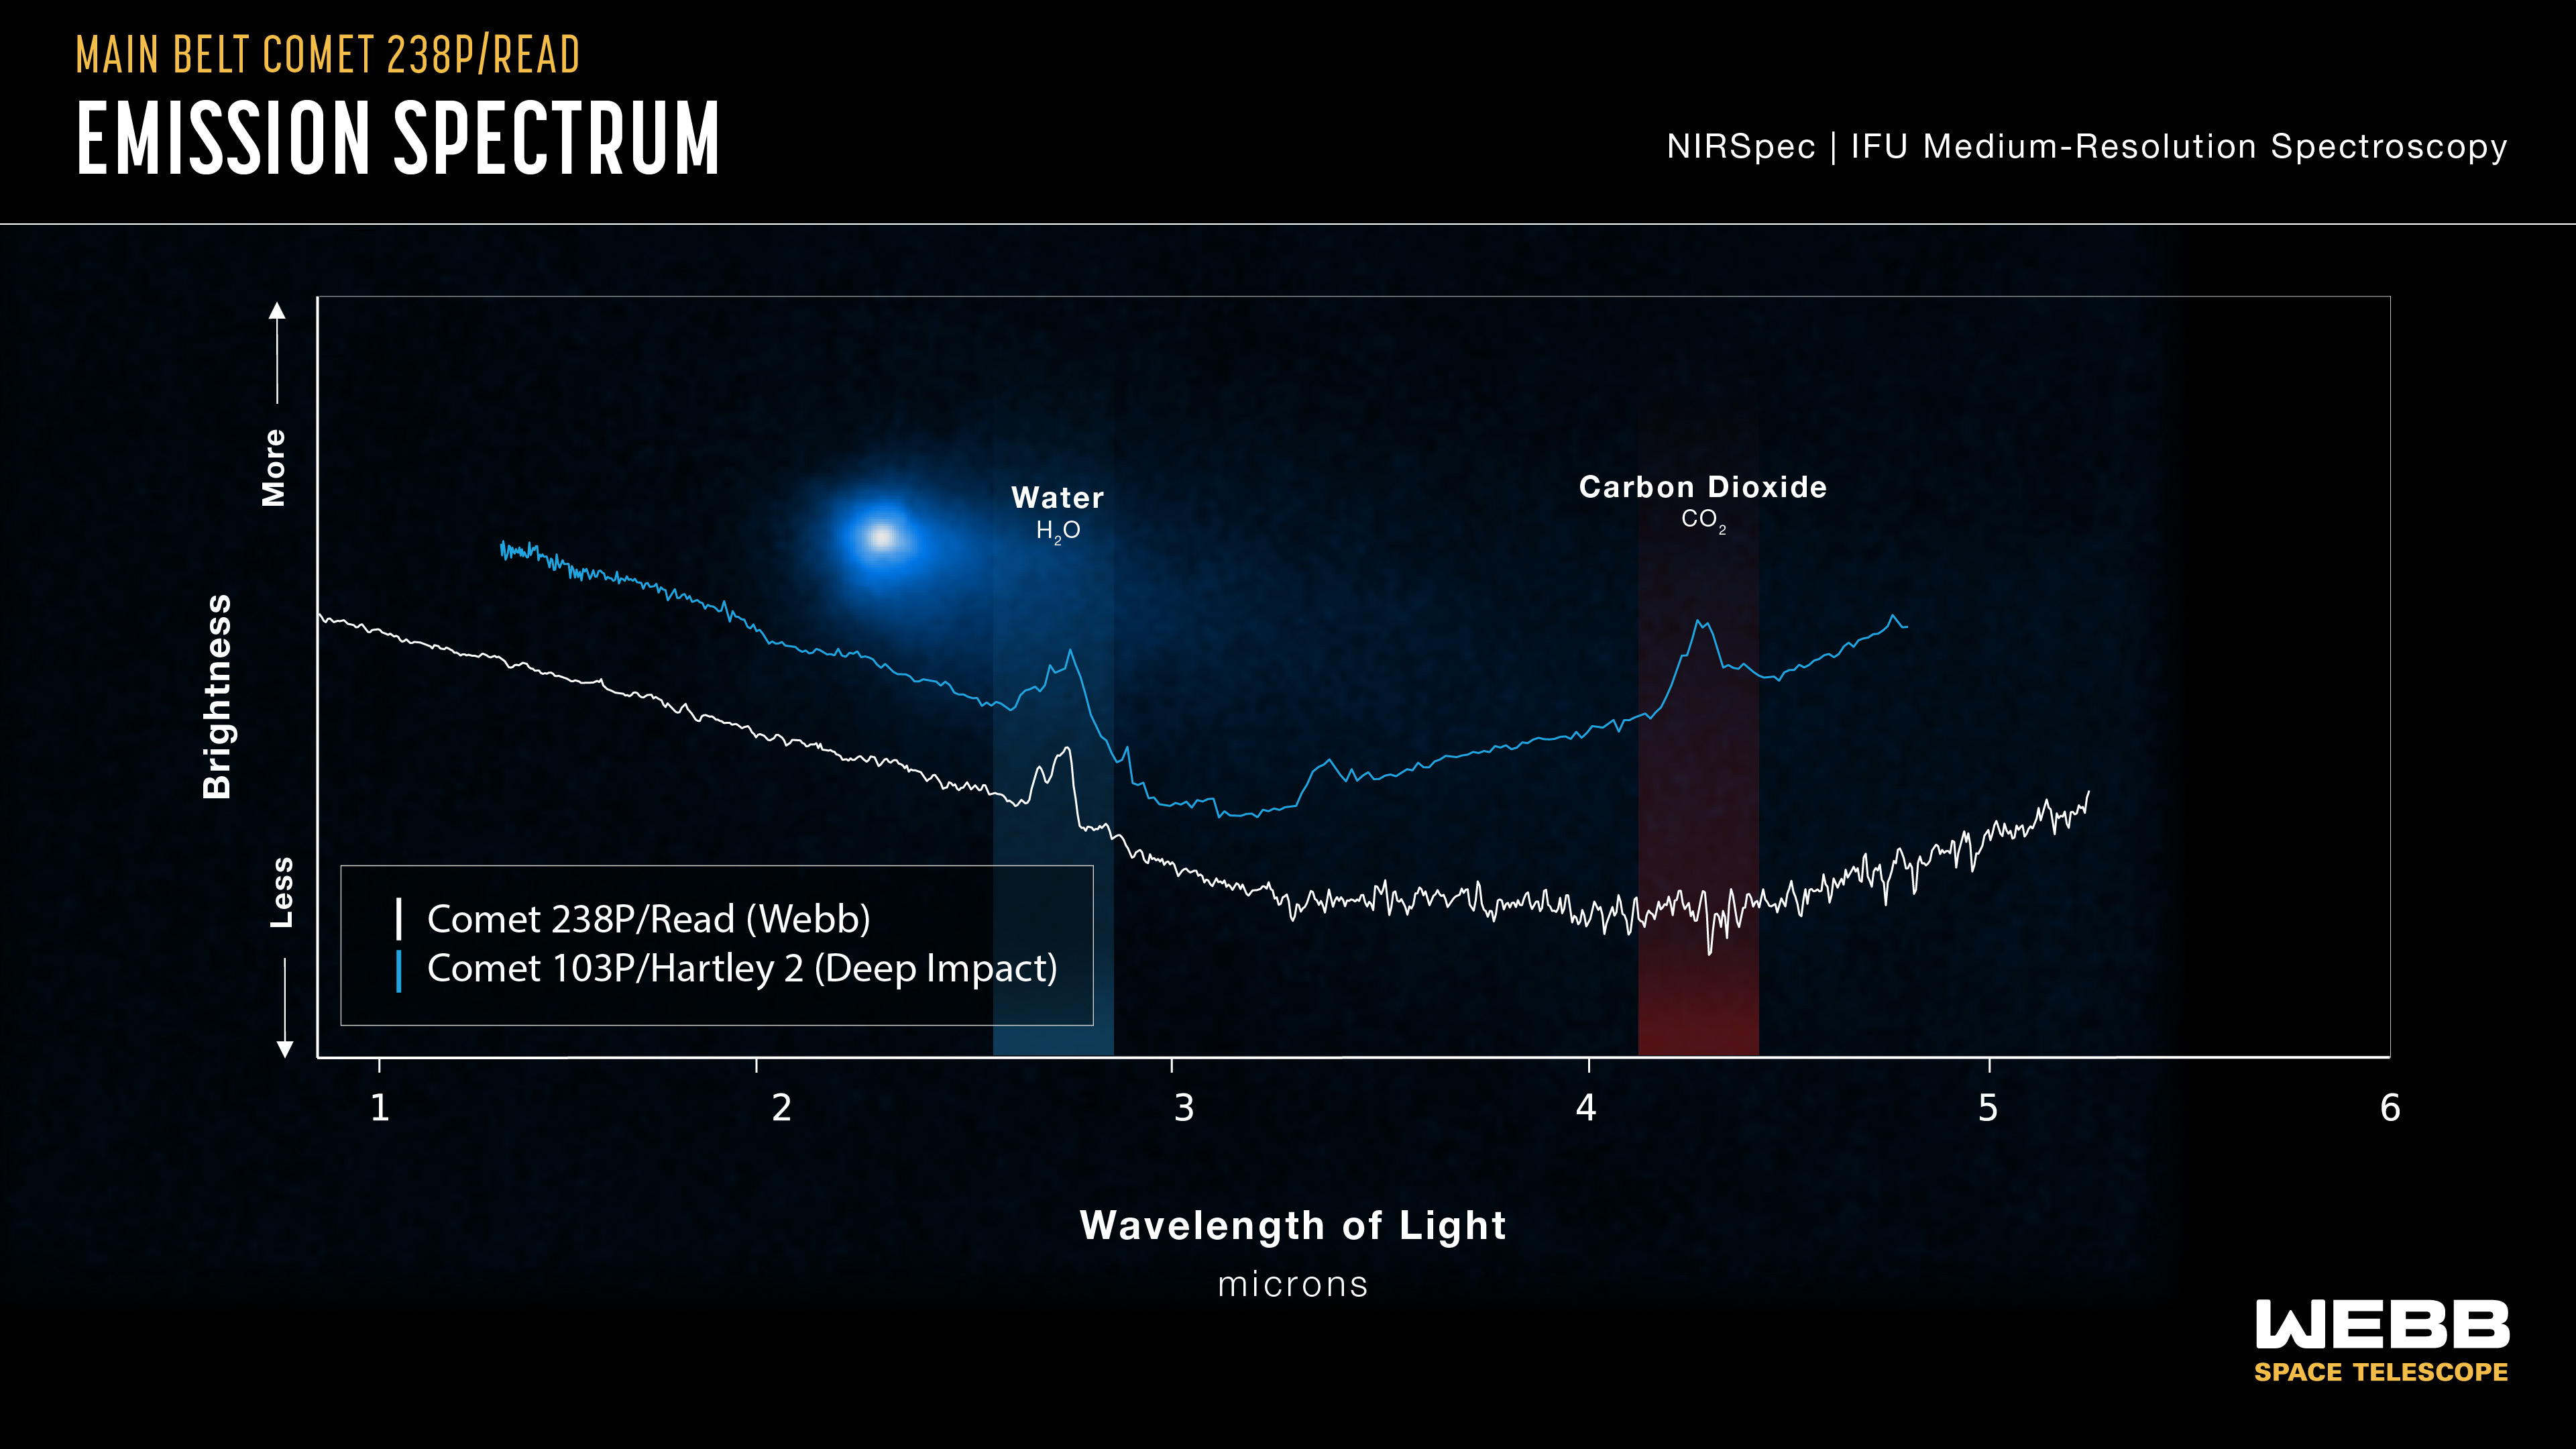

Spectral data of Comet 238 P/Read and Comet 109 P/Hartley 2

This graphic presentation of spectral data highlights a key similarity and difference between observations of Comet 238P/Read by the NIRSpec (Near-Infrared Spectrograph) instrument on the NASA/ESA/CSA James Webb Space Telescope in 2022 and observations of Comet 103P/Hartley 2 by NASA’s Deep Impact mission in 2010. Both show a distinct peak in the region of the spectrum associated with water. Finding this in Comet Read was a significant accomplishment for Webb, as it is in a different class of comets than Jupiter-family comets like Hartley 2, and this marks the first time that a gas has been confirmed in such a main belt comet. However, Comet Read did not show the characteristic, expected bump indicating the presence of carbon dioxide.

Credit: NASA, ESA, CSA, and J. Olmsted (STScI)